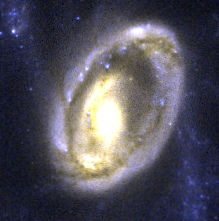

The Cartwheel Galaxy

Hubble resolves remarkable new detail in the galaxy's core. The reddish colour of this region indicates that it contains a tremendous amount of dust and embedded star formation. Bright pinpoints of light are gigantic young star clusters.

Credit: Kirk Borne (ST ScI), and NASA/ESA